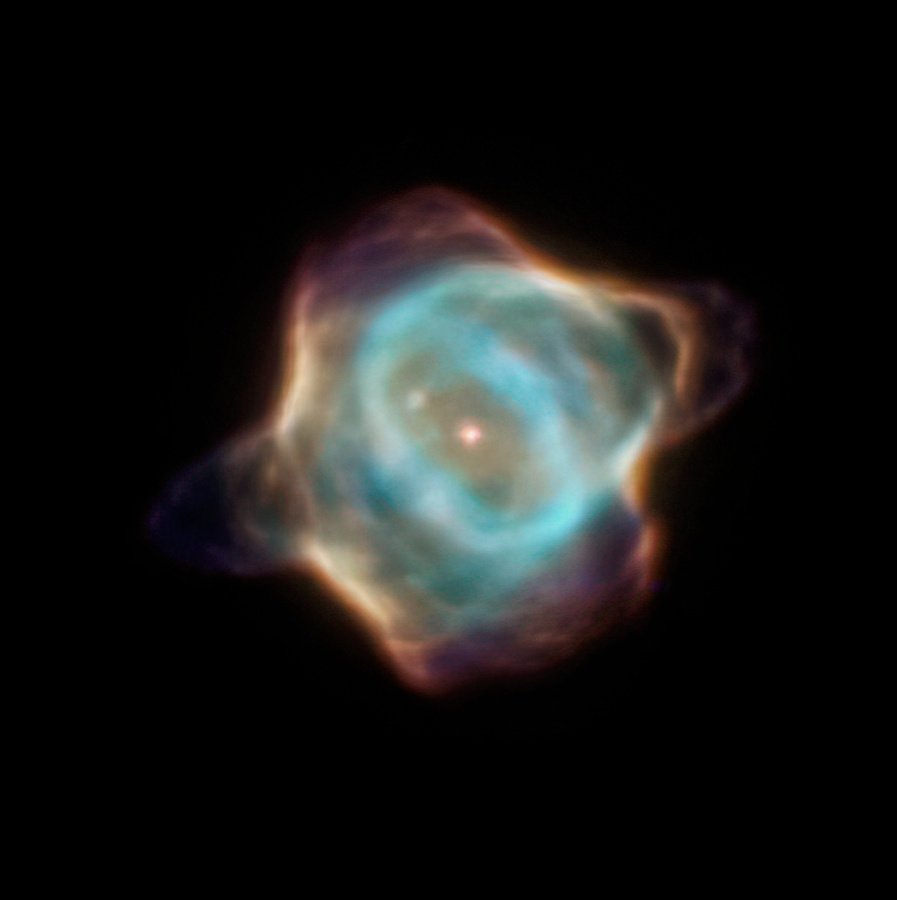

Hubble’s Observation of the Stingray Nebula in 1996

Archival data from the NASA/ESA Hubble Space Telescope reveal that the nebula Hen 3-1357, nicknamed the Stingray nebula, has faded precipitously over just the past two decades. Witnessing such a swift rate of change in a planetary nebula is exceedingly rare, say researchers.

This image captured by Hubble in 1996 demonstrates how the nebula appeared before it dimmed drastically in brightness and changed shape. At this time, it was characterised by bright blue shells of gas near the centre of the nebula.

Credit: NASA, ESA, B. Balick (University of Washington), M. Guerrero (Instituto de Astrofísica de Andalucía), and G. Ramos-Larios (Universidad de Guadalajara)